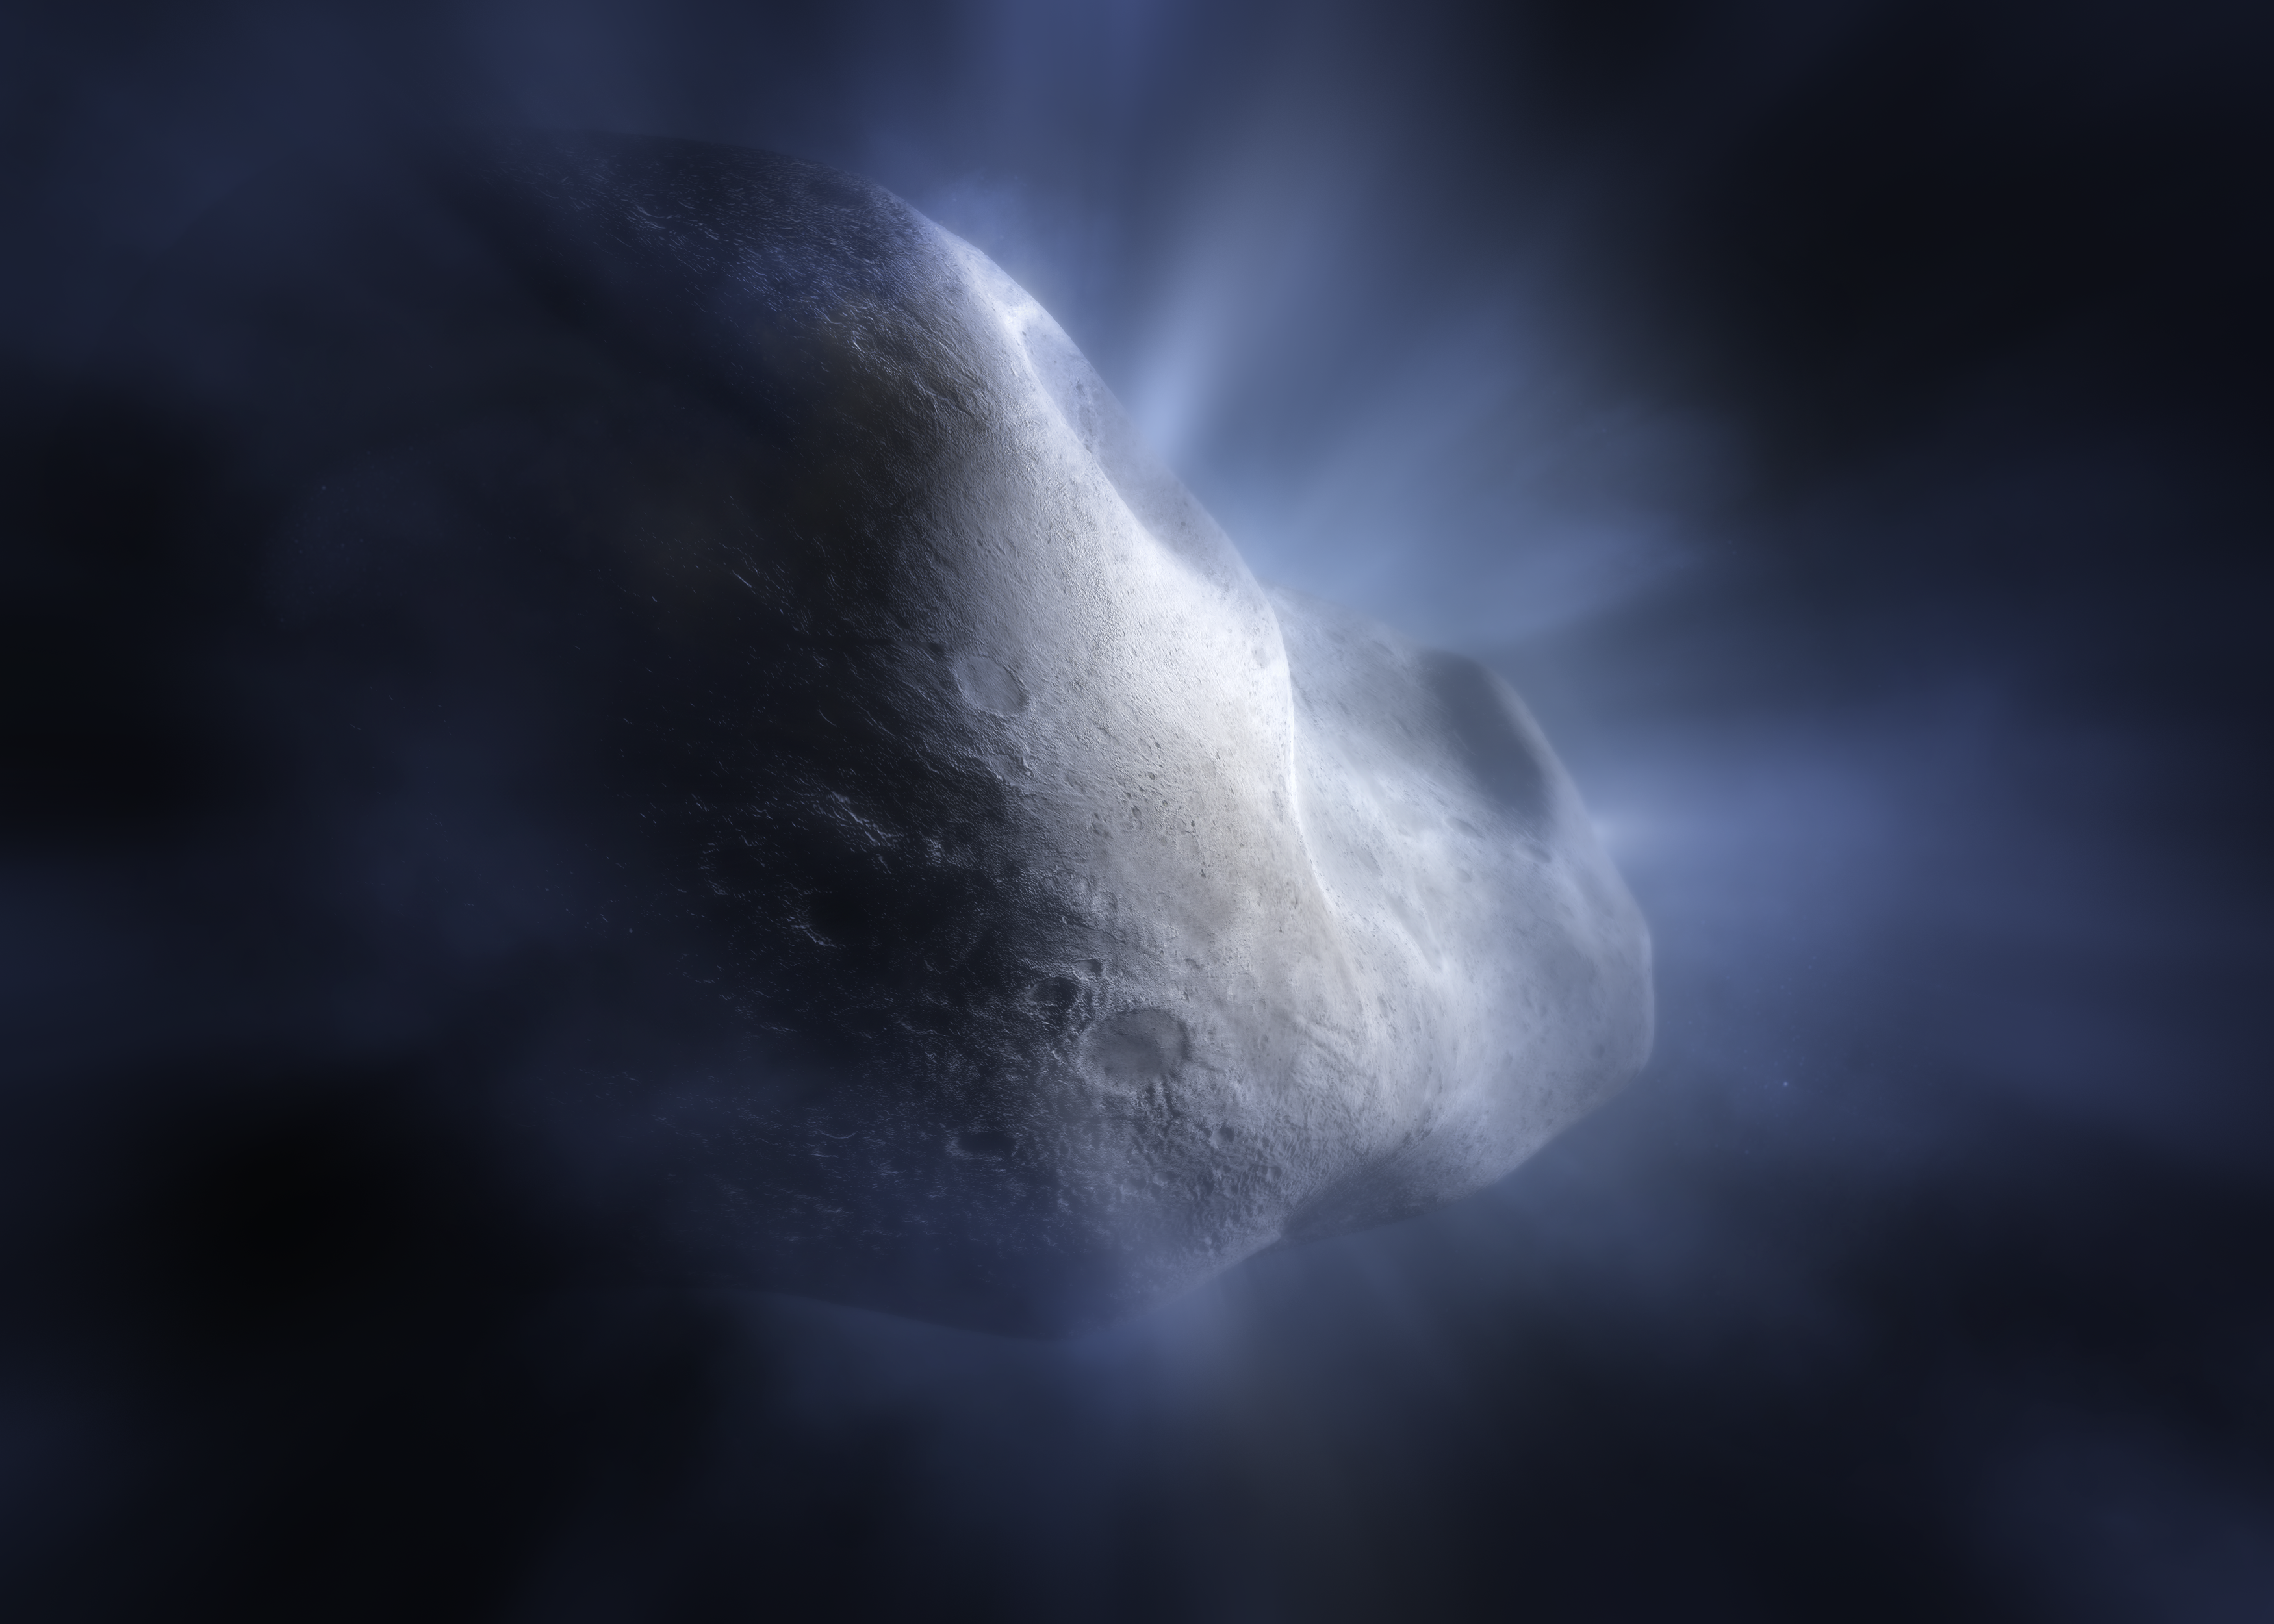

Artist’s concept of Comet 238P/Read

This artist’s concept of Comet 238P/Read shows the main belt comet sublimating—its water ice vapourising as its orbit approaches the Sun. This is significant, as the sublimation is what distinguishes comets from asteroids, creating their distinctive tail and hazy halo, or coma. The NASA/ESA/CSA James Webb Space Telescope’s detection of water vapour at Comet Read is a major benchmark in the study of main belt comets, and in the broader investigation of the origin of Earth’s abundant water.

Credit: NASA, ESA